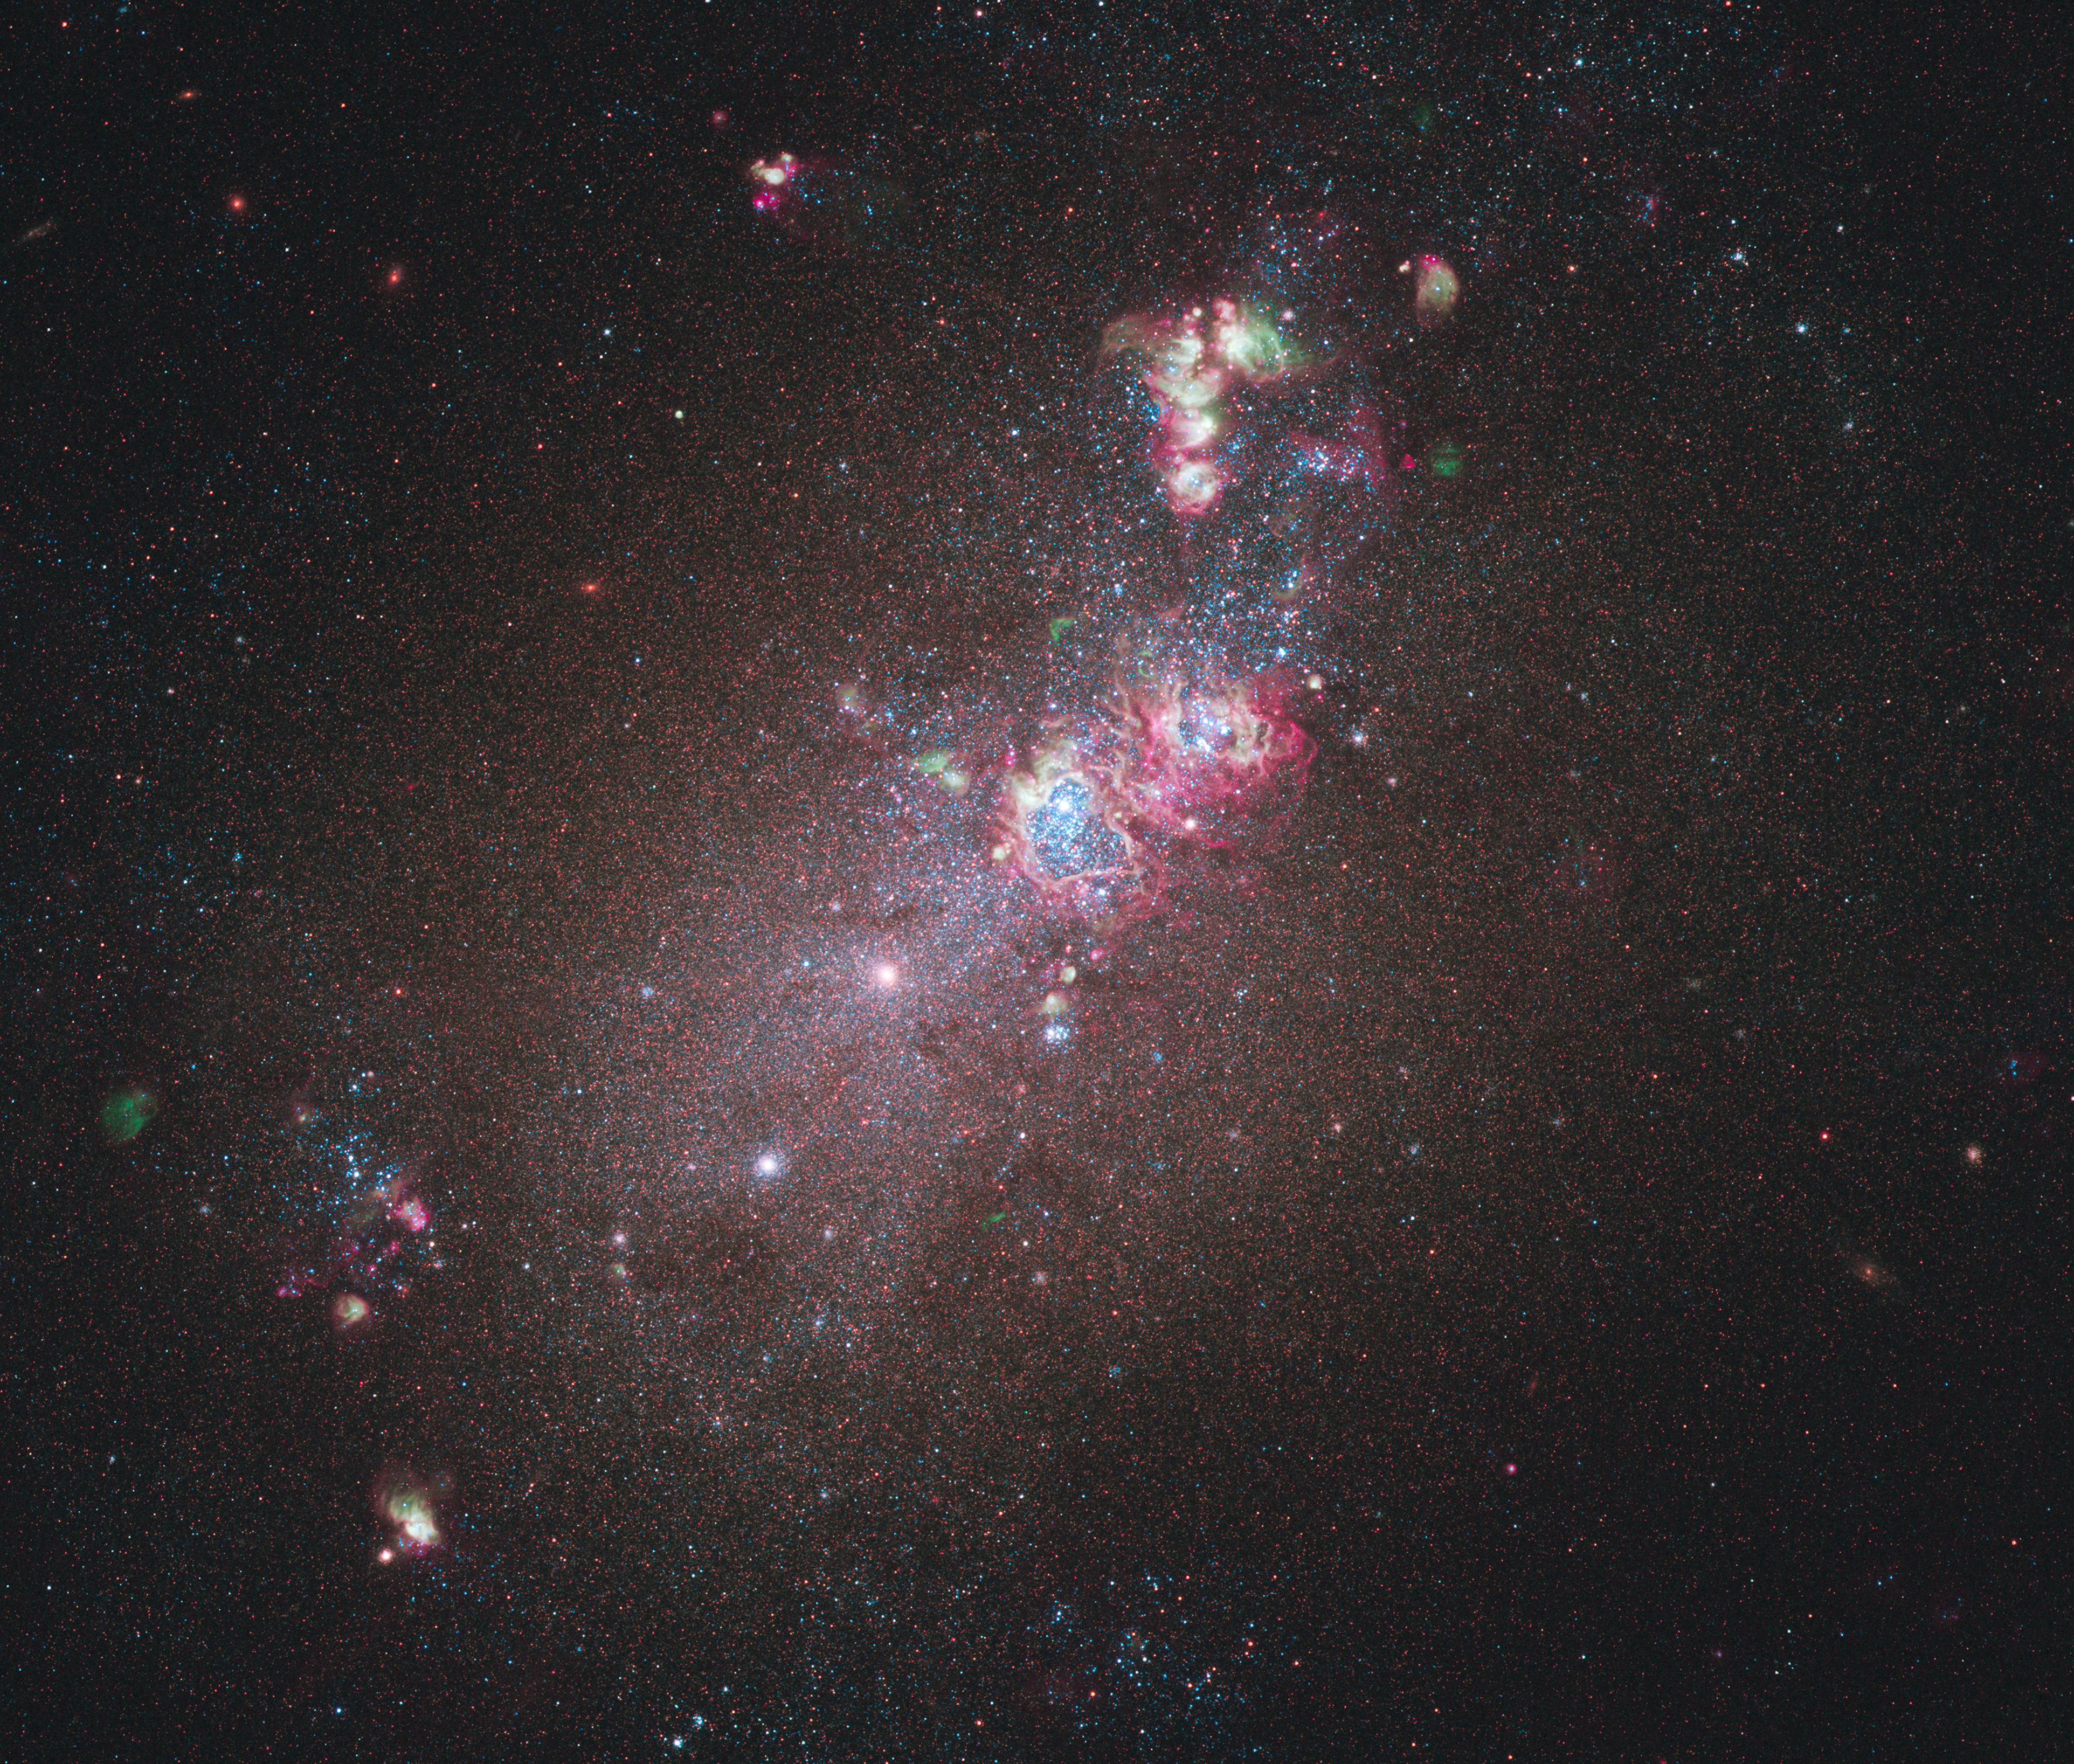

A star formation laboratory

Galaxy NGC 4214, pictured here in an image from the NASA/ESA Hubble Space Telescope’s newest camera, is an ideal location to study star formation and evolution. Dominating much of the galaxy is a huge glowing cloud of hydrogen gas in which new stars are being born. A heart-shaped hollow — possibly galaxy NGC 4214’s most eye-catching feature — can be seen at the centre of this. Inside this cavity lies a large cluster of massive, young stars ranging in temperature from 10 000 to 50 000 degrees Celsius. Their strong stellar winds are responsible for the creation of this bubble. These features have the effect of stemming any further star formation due to the subsequent lack of gas.

Credit: NASA, ESA and the Hubble Heritage Team (STScI/AURA)-ESA/Hubble Collaboration. Acknowledgment: R. O’Connell (University of Virginia) and the WFC3 Scientific Oversight Committee